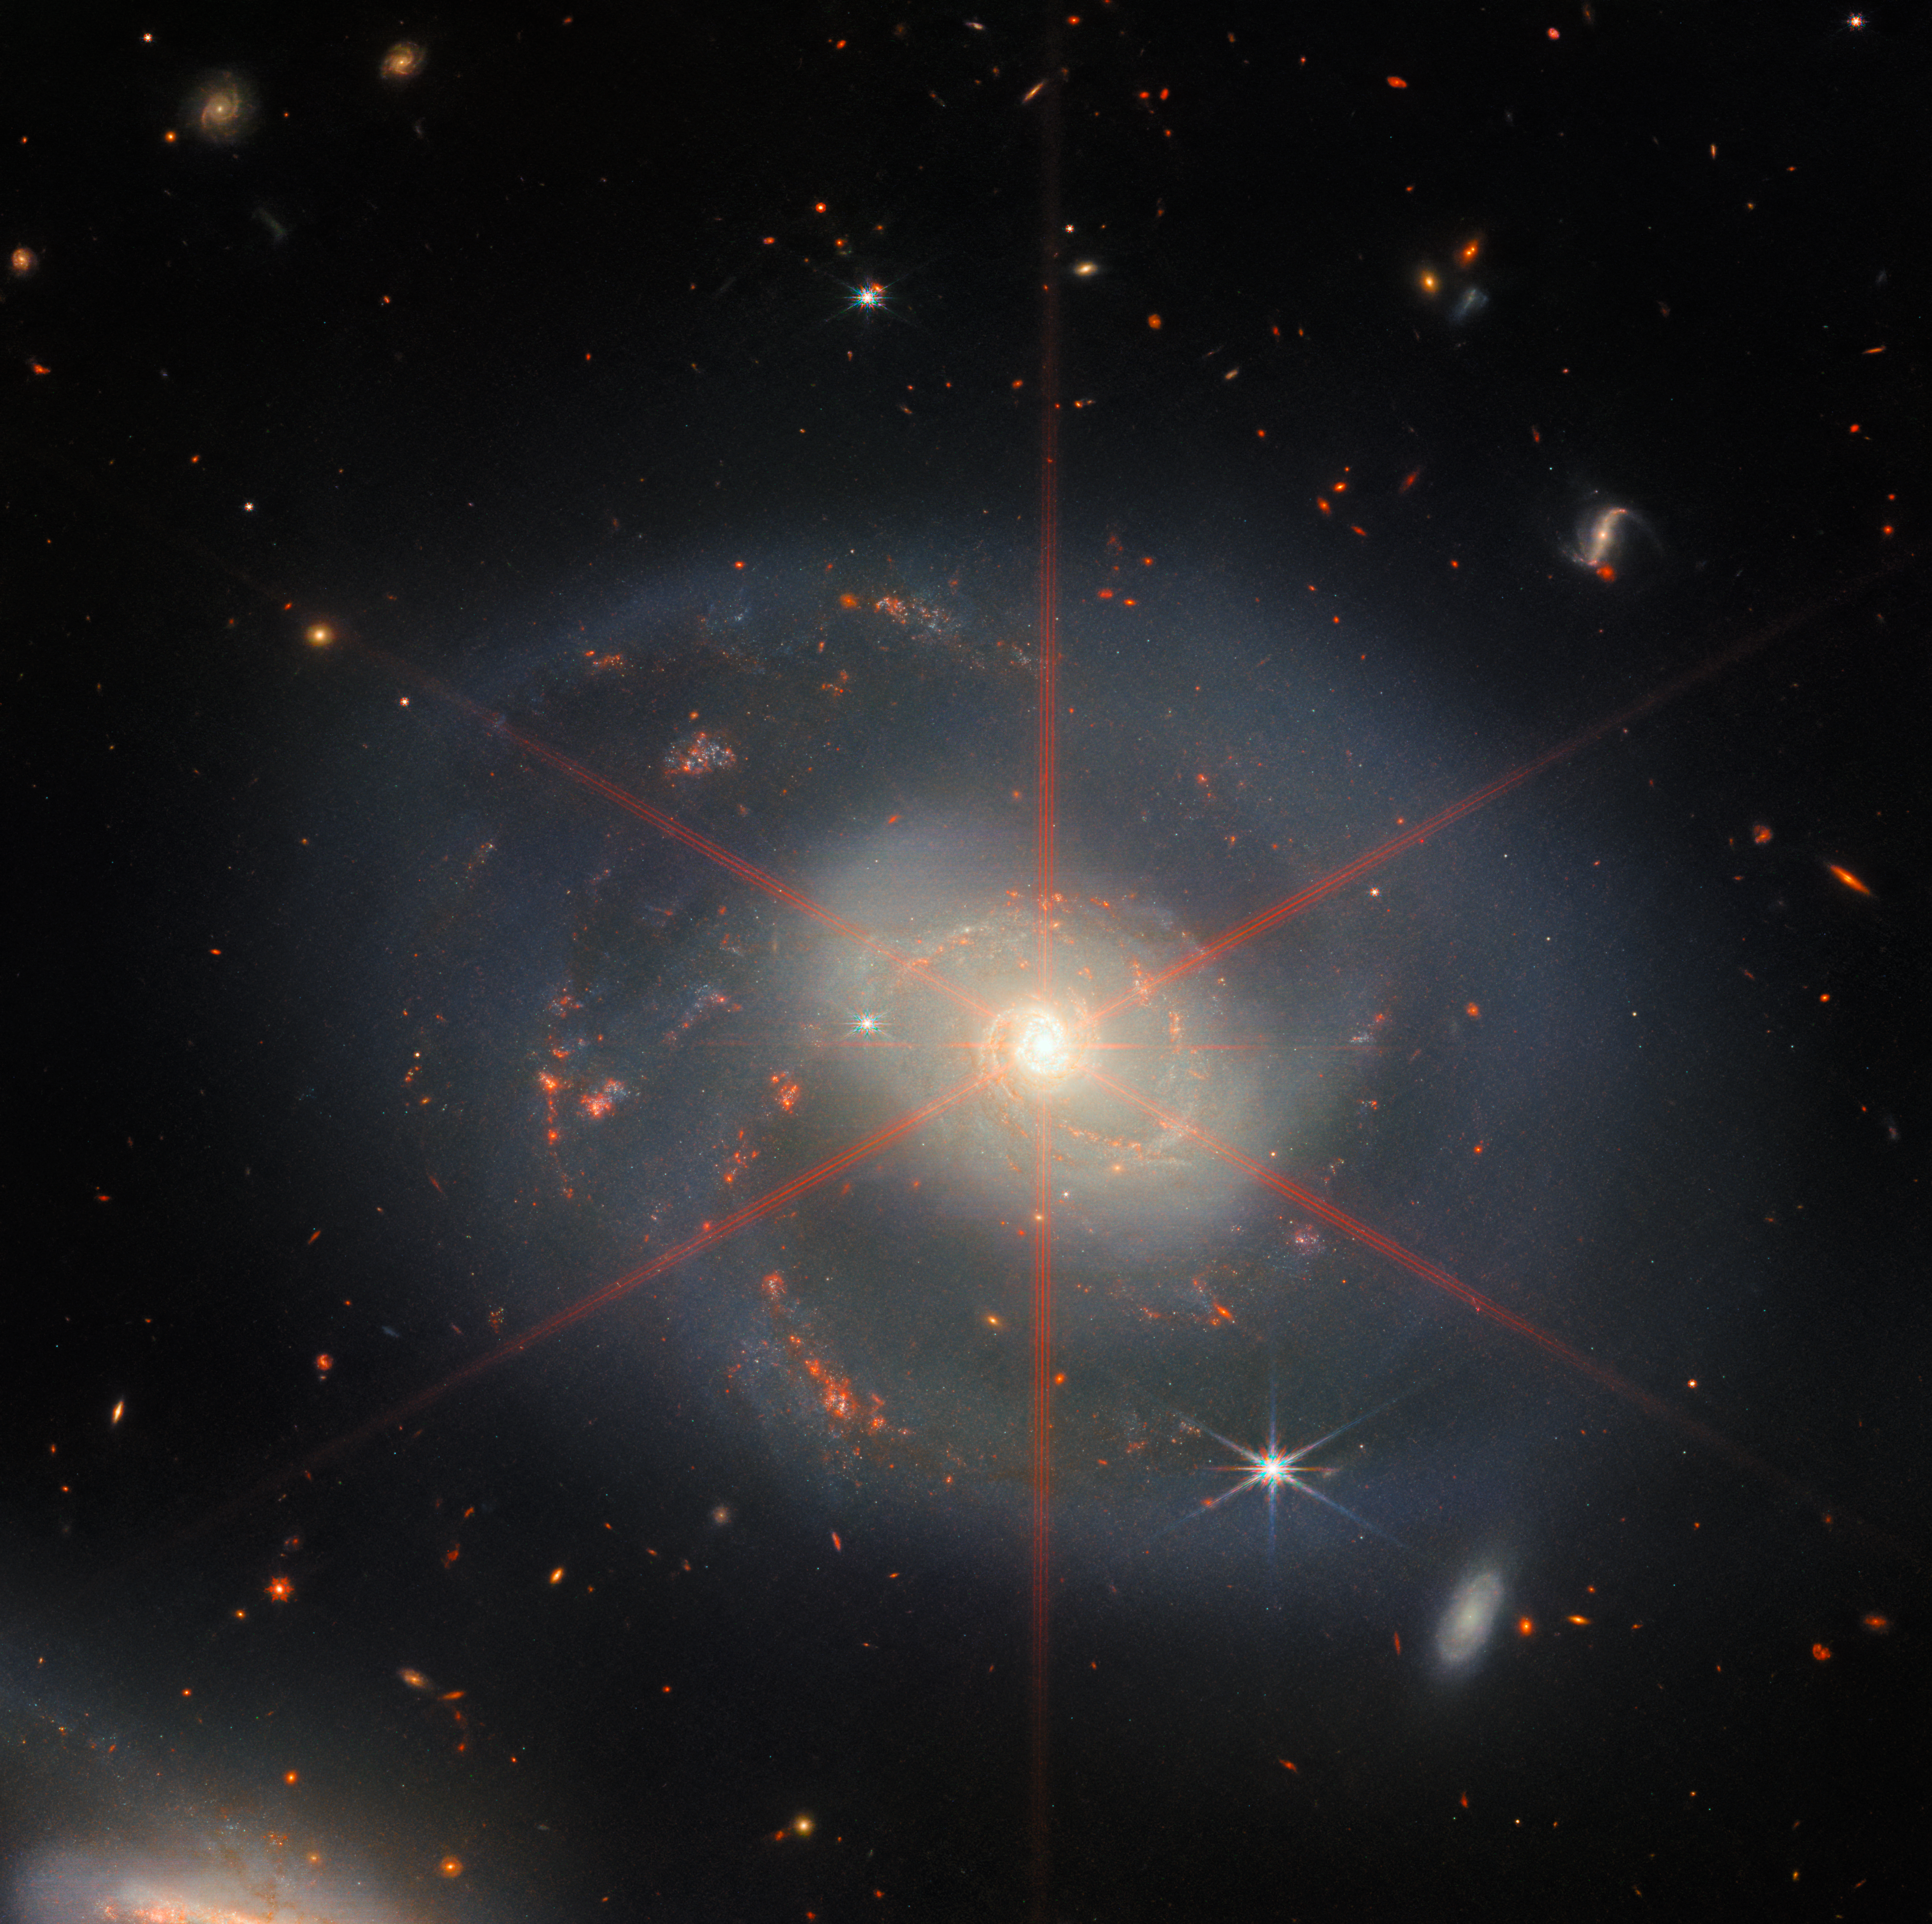

A Wreath of Star Formation in NGC 7469

This image is dominated by NGC 7469, a luminous, face-on spiral galaxy approximately 90 000 light-years in diameter that lies roughly 220 million light-years from Earth in the constellation Pegasus. Its companion galaxy IC 5283 is partly visible in the lower left portion of this image.

This spiral galaxy has recently been studied as part of the Great Observatories All-sky LIRGs Survey (GOALS) Early Release Science program with the NASA/ESA/CSA James Webb Space Telescope, which aims to study the physics of star formation, black hole growth, and feedback in four nearby, merging luminous infrared galaxies. Other galaxies studied as part of the survey include previous ESA/Webb Pictures of the Month II ZW 096 and IC 1623.

NGC 7469 is home to an active galactic nucleus (AGN), which is an extremely bright central region that is dominated by the light emitted by dust and gas as it falls into the galaxy’s central black hole. This galaxy provides astronomers with the unique opportunity to study the relationship between AGNs and starburst activity because this particular object hosts an AGN that is surrounded by a starburst ring at a distance of a mere 1500 light-years. While NGC 7469 is one of the best studied AGNs in the sky, the compact nature of this system and the presence of a great deal of dust have made it difficult for scientists to achieve both the resolution and sensitivity needed to study this relationship in the infrared. Now, with Webb, astronomers can explore the galaxy’s starburst ring, the central AGN, and the gas and dust in between.

Using Webb’s MIRI, NIRCam and NIRspec instruments to obtain images and spectra of NGC 7469 in unprecedented detail, the GOALS team has uncovered a number of details about the object. This includes very young star-forming clusters never seen before, as well as pockets of very warm, turbulent molecular gas, and direct evidence for the destruction of small dust grains within a few hundred light-years of the nucleus — proving that the AGN is impacting the surrounding interstellar medium. Furthermore, highly ionised, diffuse atomic gas seems to be exiting the nucleus at roughly 6.4 million kilometres per hour — part of a galactic outflow that had previously been identified, but is now revealed in stunning detail with Webb. With analysis of the rich Webb datasets still underway, additional secrets of this local AGN and starburst laboratory are sure to be revealed.

A prominent feature of this image is the striking six-pointed star that perfectly aligns with the heart of NGC 7469. Unlike the galaxy, this is not a real celestial object, but an imaging artifact known as a diffraction spike, caused by the bright, unresolved AGN. Diffraction spikes are patterns produced as light bends around the sharp edges of a telescope. Webb’s primary mirror is composed of hexagonal segments that each contain edges for light to diffract against, giving six bright spikes. There are also two shorter, fainter spikes, which are created by diffraction from the vertical strut that helps support Webb’s secondary mirror.

Credit: ESA/Webb, NASA & CSA, L. Armus, A. S. Evans